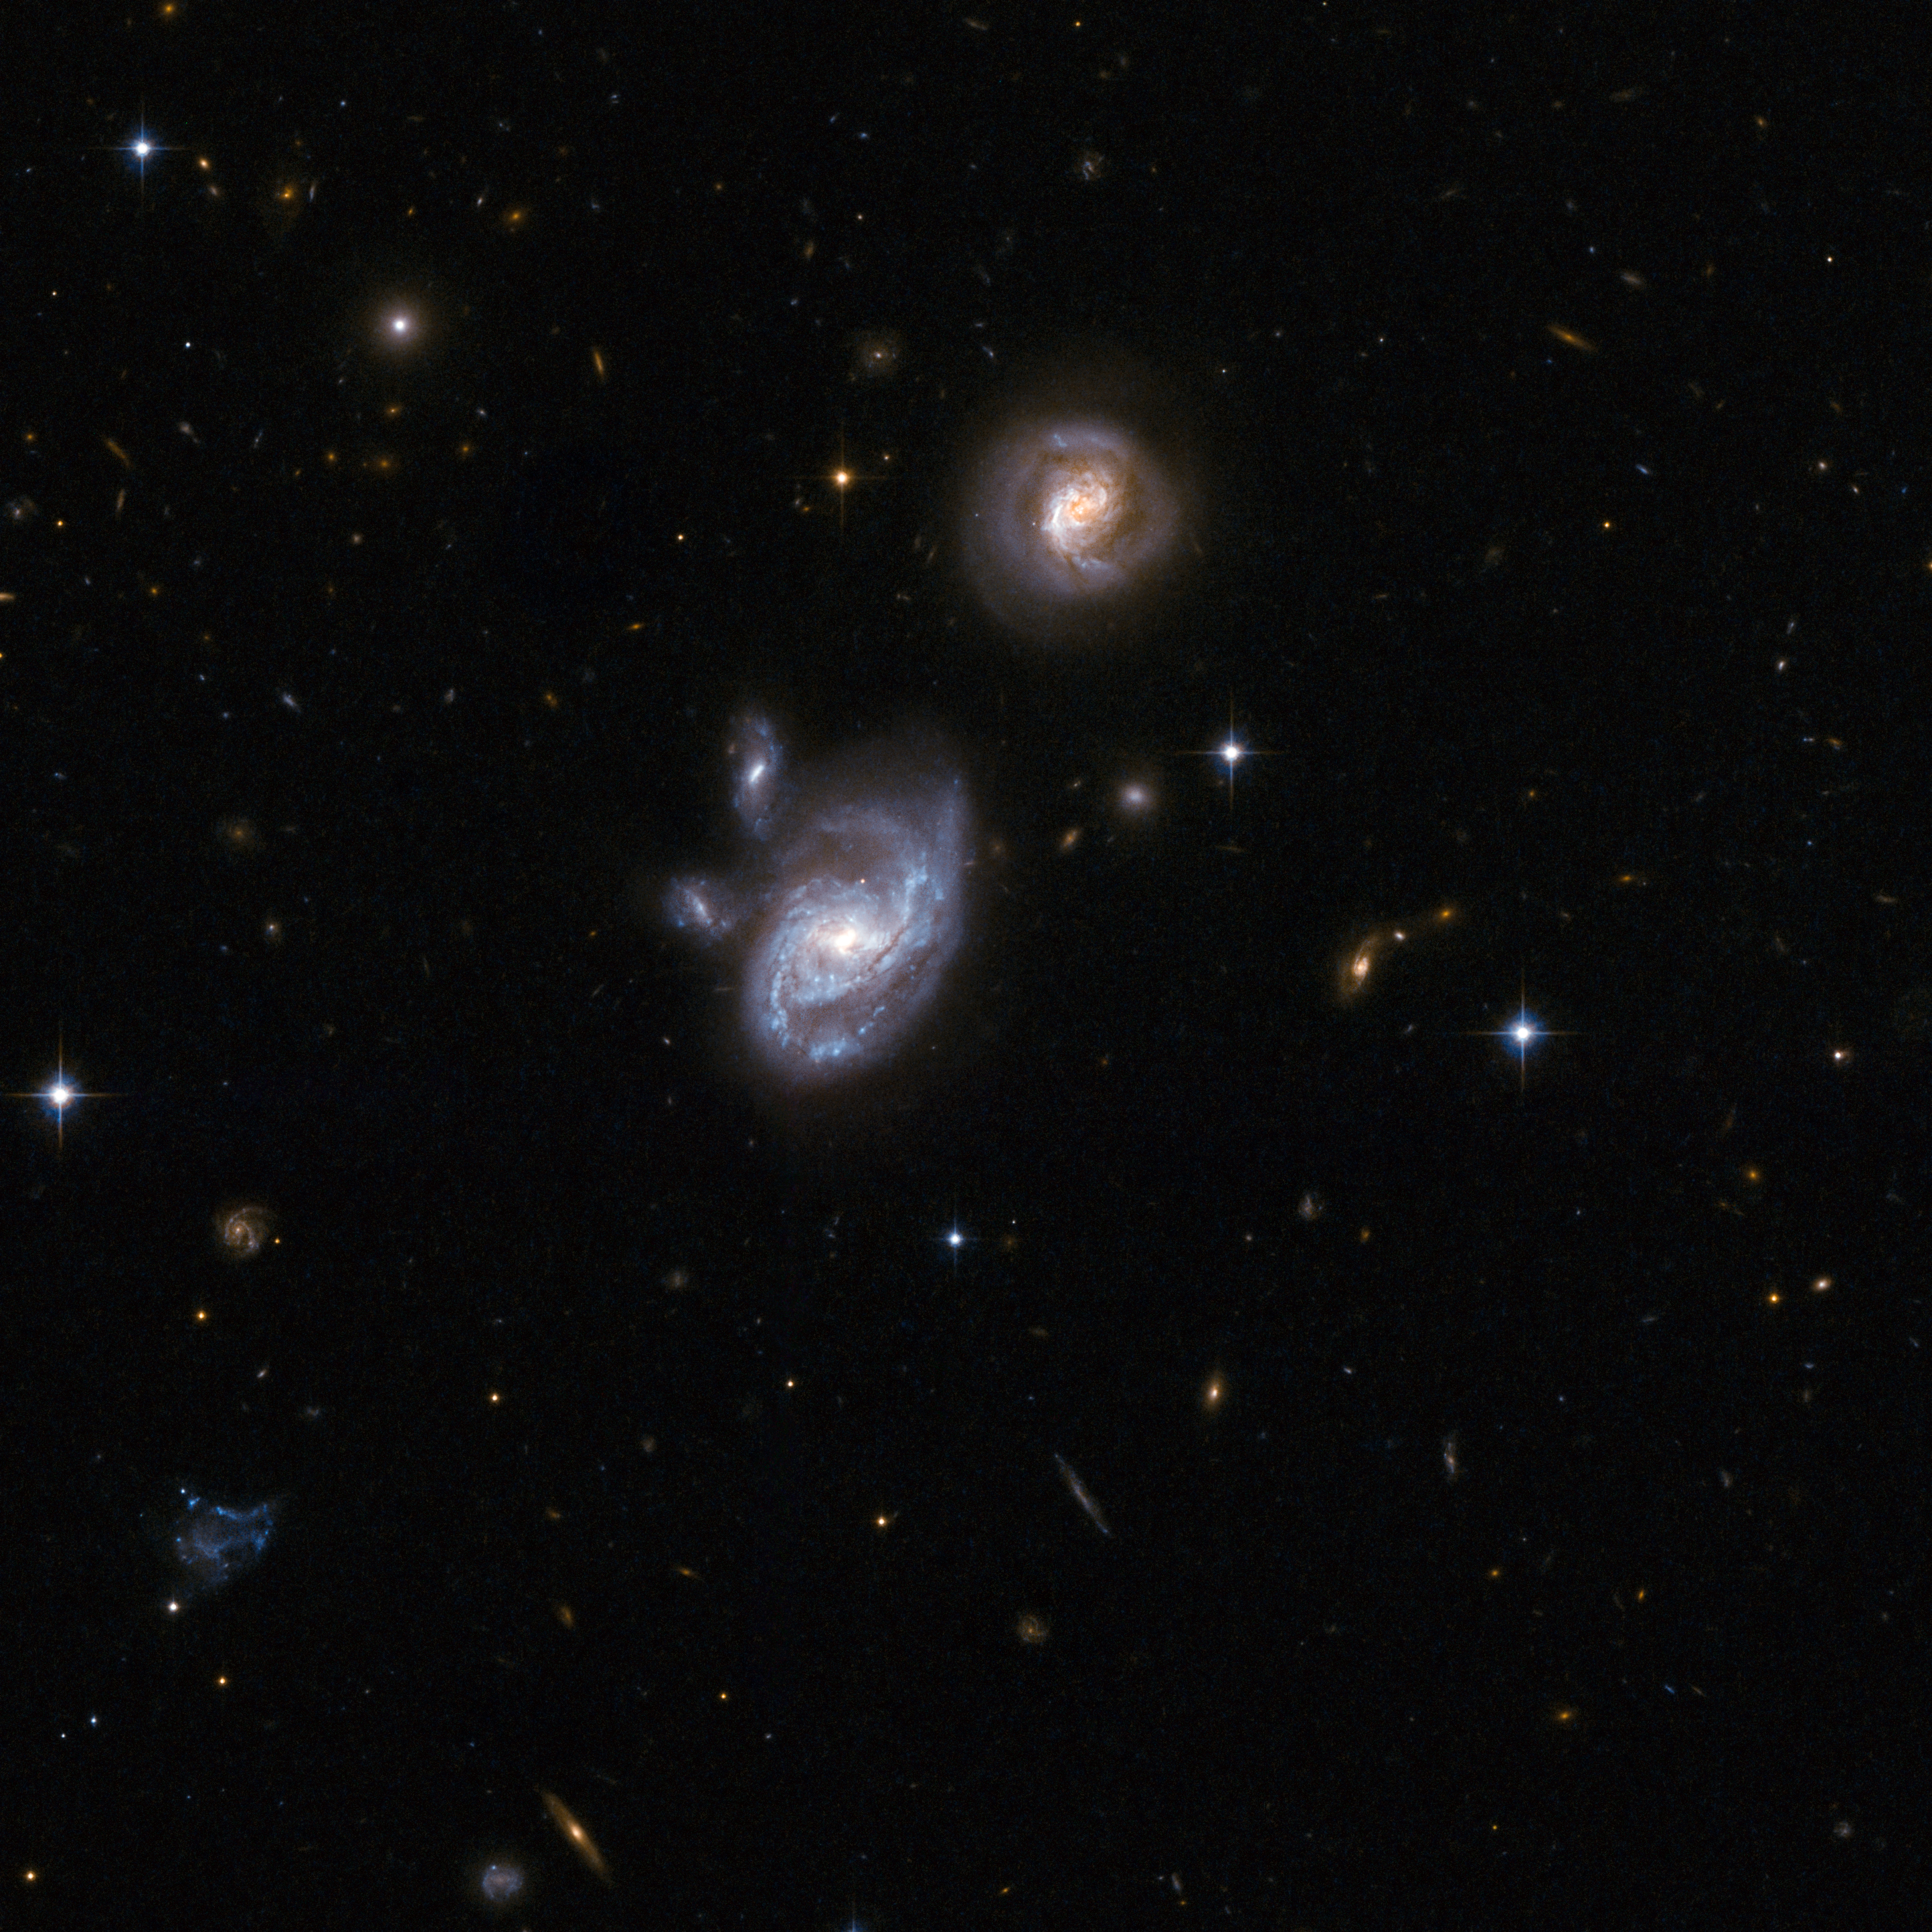

2MASXJ09133888-1019196

2MASXJ09133888-1019196 comprises two interacting galaxies that are both disturbed by gravitational interaction. The wide separation of the pair -approximately 130,000 light-years - suggests that the galaxies are just beginning to merge. Together the two galaxies form an ultraluminous infrared system, which is unusual for the early stages of an interaction. One possible explanation is that the one or both of the components have already experienced a merger or interaction. Giant black holes lurk at the cores of both galaxies, which are found in the constellation of Hydra, the Sea Serpent, about 700 million light-years away from Earth.

This image is part of a large collection of 59 images of merging galaxies taken by the Hubble Space Telescope and released on the occasion of its 18th anniversary on 24th April 2008.

Credit: NASA, ESA, the Hubble Heritage Team (STScI/AURA)-ESA/Hubble Collaboration and A. Evans (University of Virginia, Charlottesville/NRAO/Stony Brook University)